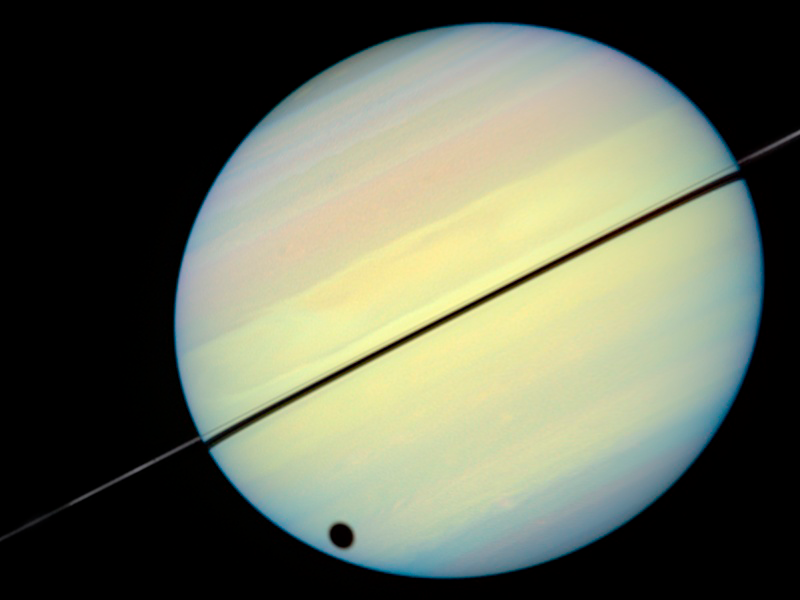

Hubble Catches Titan Chasing Its Shadow - Frame 2

This movie still shows Titan chasing its shadow across Saturn's disk. The still is from a movie created from images taken by NASA/ESA Hubble Space Telescope. It reveals the planet's rings tilted nearly edge-on toward the Earth, an event that occurs once every 15 years.

Credit: NASA/ESA and E. Karkoschka (University of Arizona)